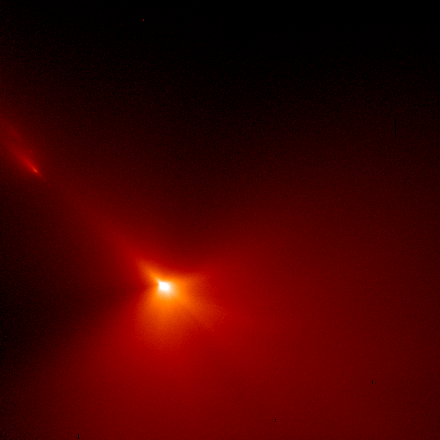

Inner Region of Comet Hyakutake

This image is 2070 miles across (3340 km) and shows that most of the dust is being produced on the sunward-facing hemisphere of the comet. Also at upper left are three small pieces which have broken off the comet and are forming there own tails.

Credit: H. A. Weaver (Applied Research Corp.), HST Comet Hyakutake Observing Team, and NASA/ESA